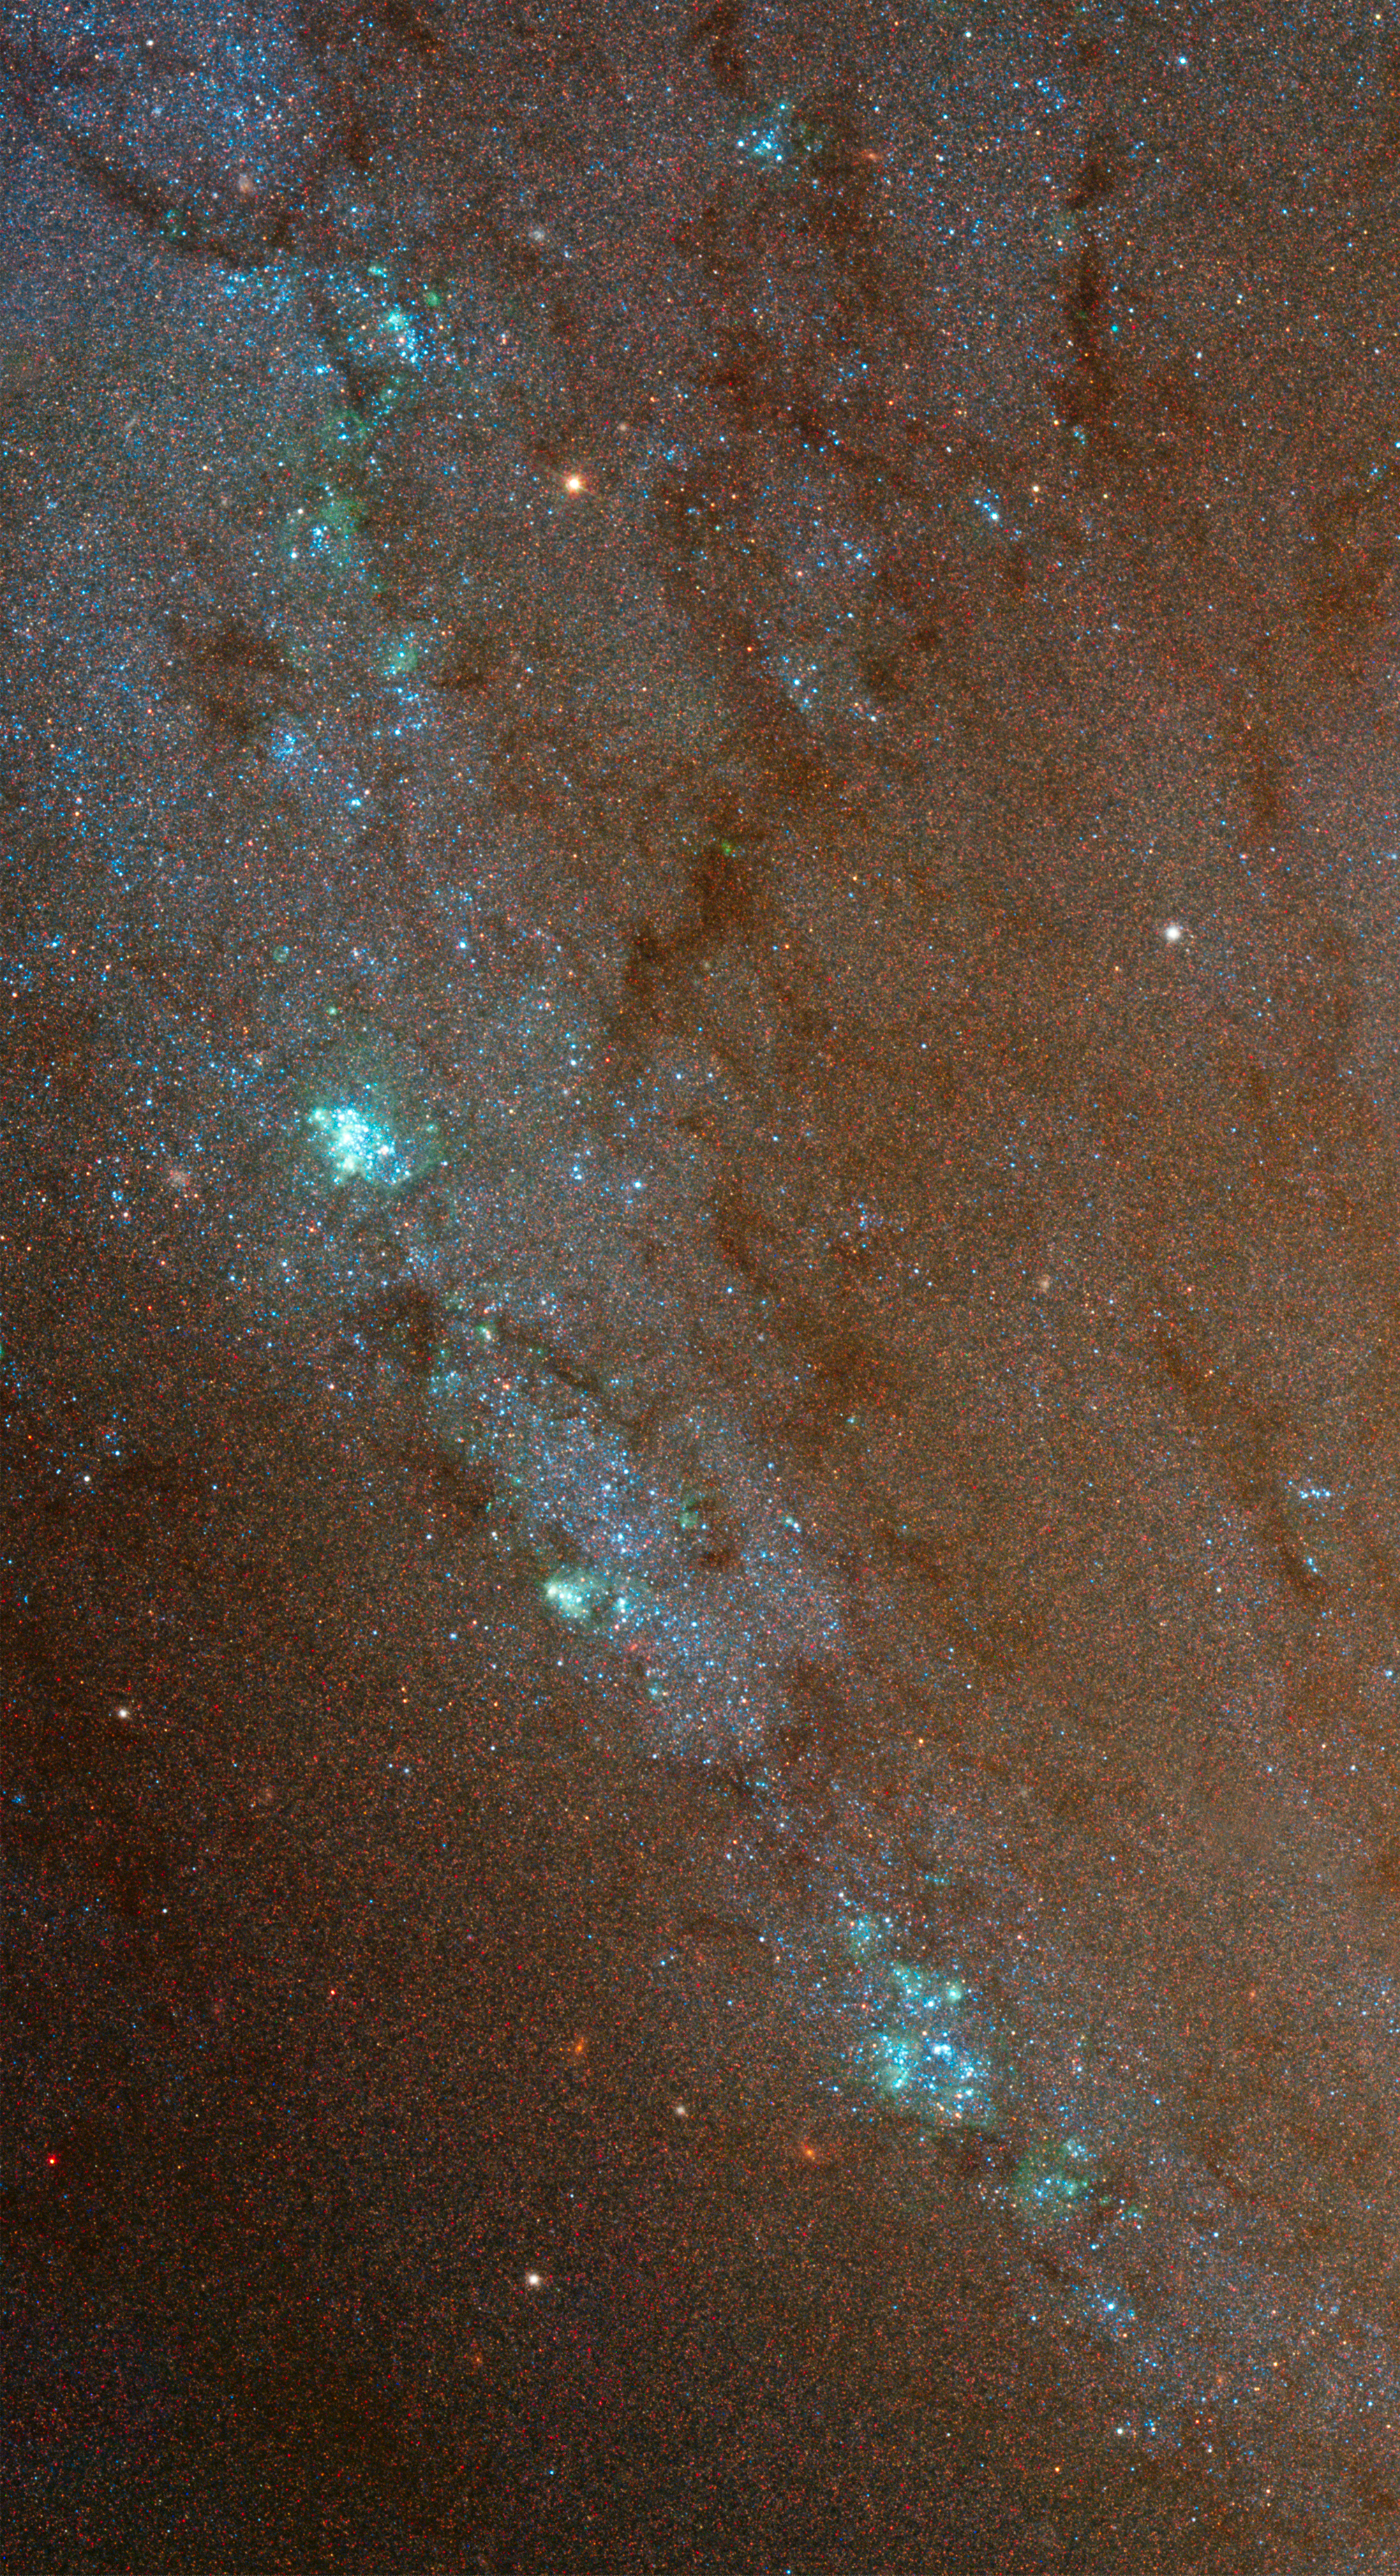

Spiral Galaxy M81 Details 2

Southern arm of M81 including a chain of HII regions.

Credit: NASA, ESA and the Hubble Heritage Team (STScI/AURA). Acknowledgment: A. Zezas and J. Huchra (Harvard-Smithsonian Center for Astrophysics)